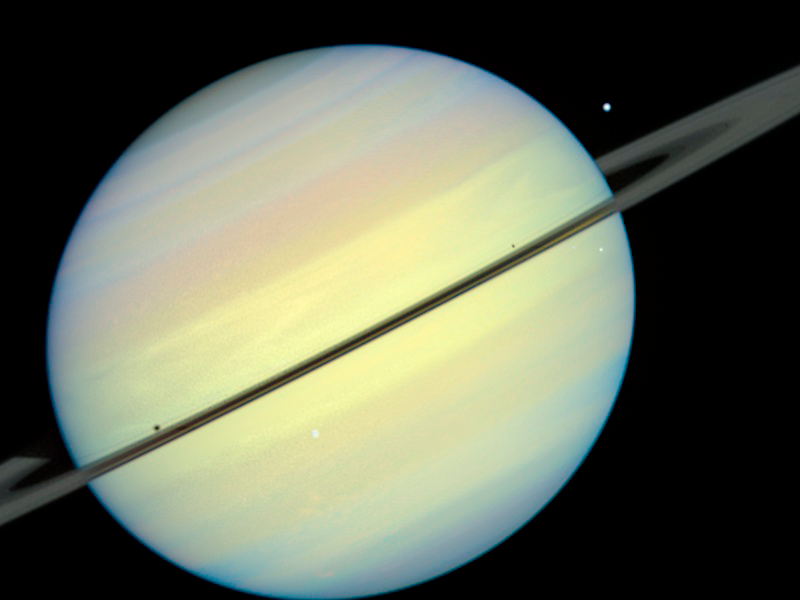

Saturn's Moons - Frame 4

This movie still captures the moons Mimas, Enceladus, and Dione as they begin their race across Saturn's disk. The still is from a movie created from images taken by NASA/ESA Hubble Space Telescope. It reveals the planet's rings tilted nearly edge-on toward the Sun, an event that occurs once every 15 years. Because of this special alignment, the moons cast shadows on the planet and its rings.

Credit: NASA/ESA and E. Karkoschka (University of Arizona)